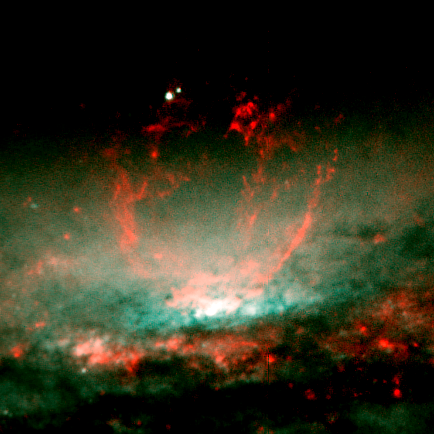

Baby Burp in Galaxy's Core (Core View)

These NASA/ESA Hubble Space Telescope snapshots reveal dramatic activities within the core of the galaxy NGC 3079, where a lumpy bubble of hot gas is rising from a cauldron of glowing matter. The picture at left shows the bubble in the center of the galaxy's disk. The structure is more than 3, 000 light-years wide and rises 3, 500 light-years above the galaxy's disk. The smaller photo at right is a close-up view of the bubble. Astronomers suspect that the bubble is being blown by 'winds' (high-speed streams of particles) released during a burst of star formation. Gaseous filaments at the top of the bubble are whirling around in a vortex and are being expelled into space. Eventually, this gas will rain down upon the galaxy's disk where it may collide with gas clouds, compress them, and form a new generation of stars. The two white dots just above the bubble are probably stars in the galaxy.

Credit: NASA/ESA, Gerald Cecil (University of North Carolina), Sylvain Veilleux (University of Maryland), Joss Bland-Hawthorn (Anglo-Australian Observatory), and Alex Filippenko (University of California at Berkeley).